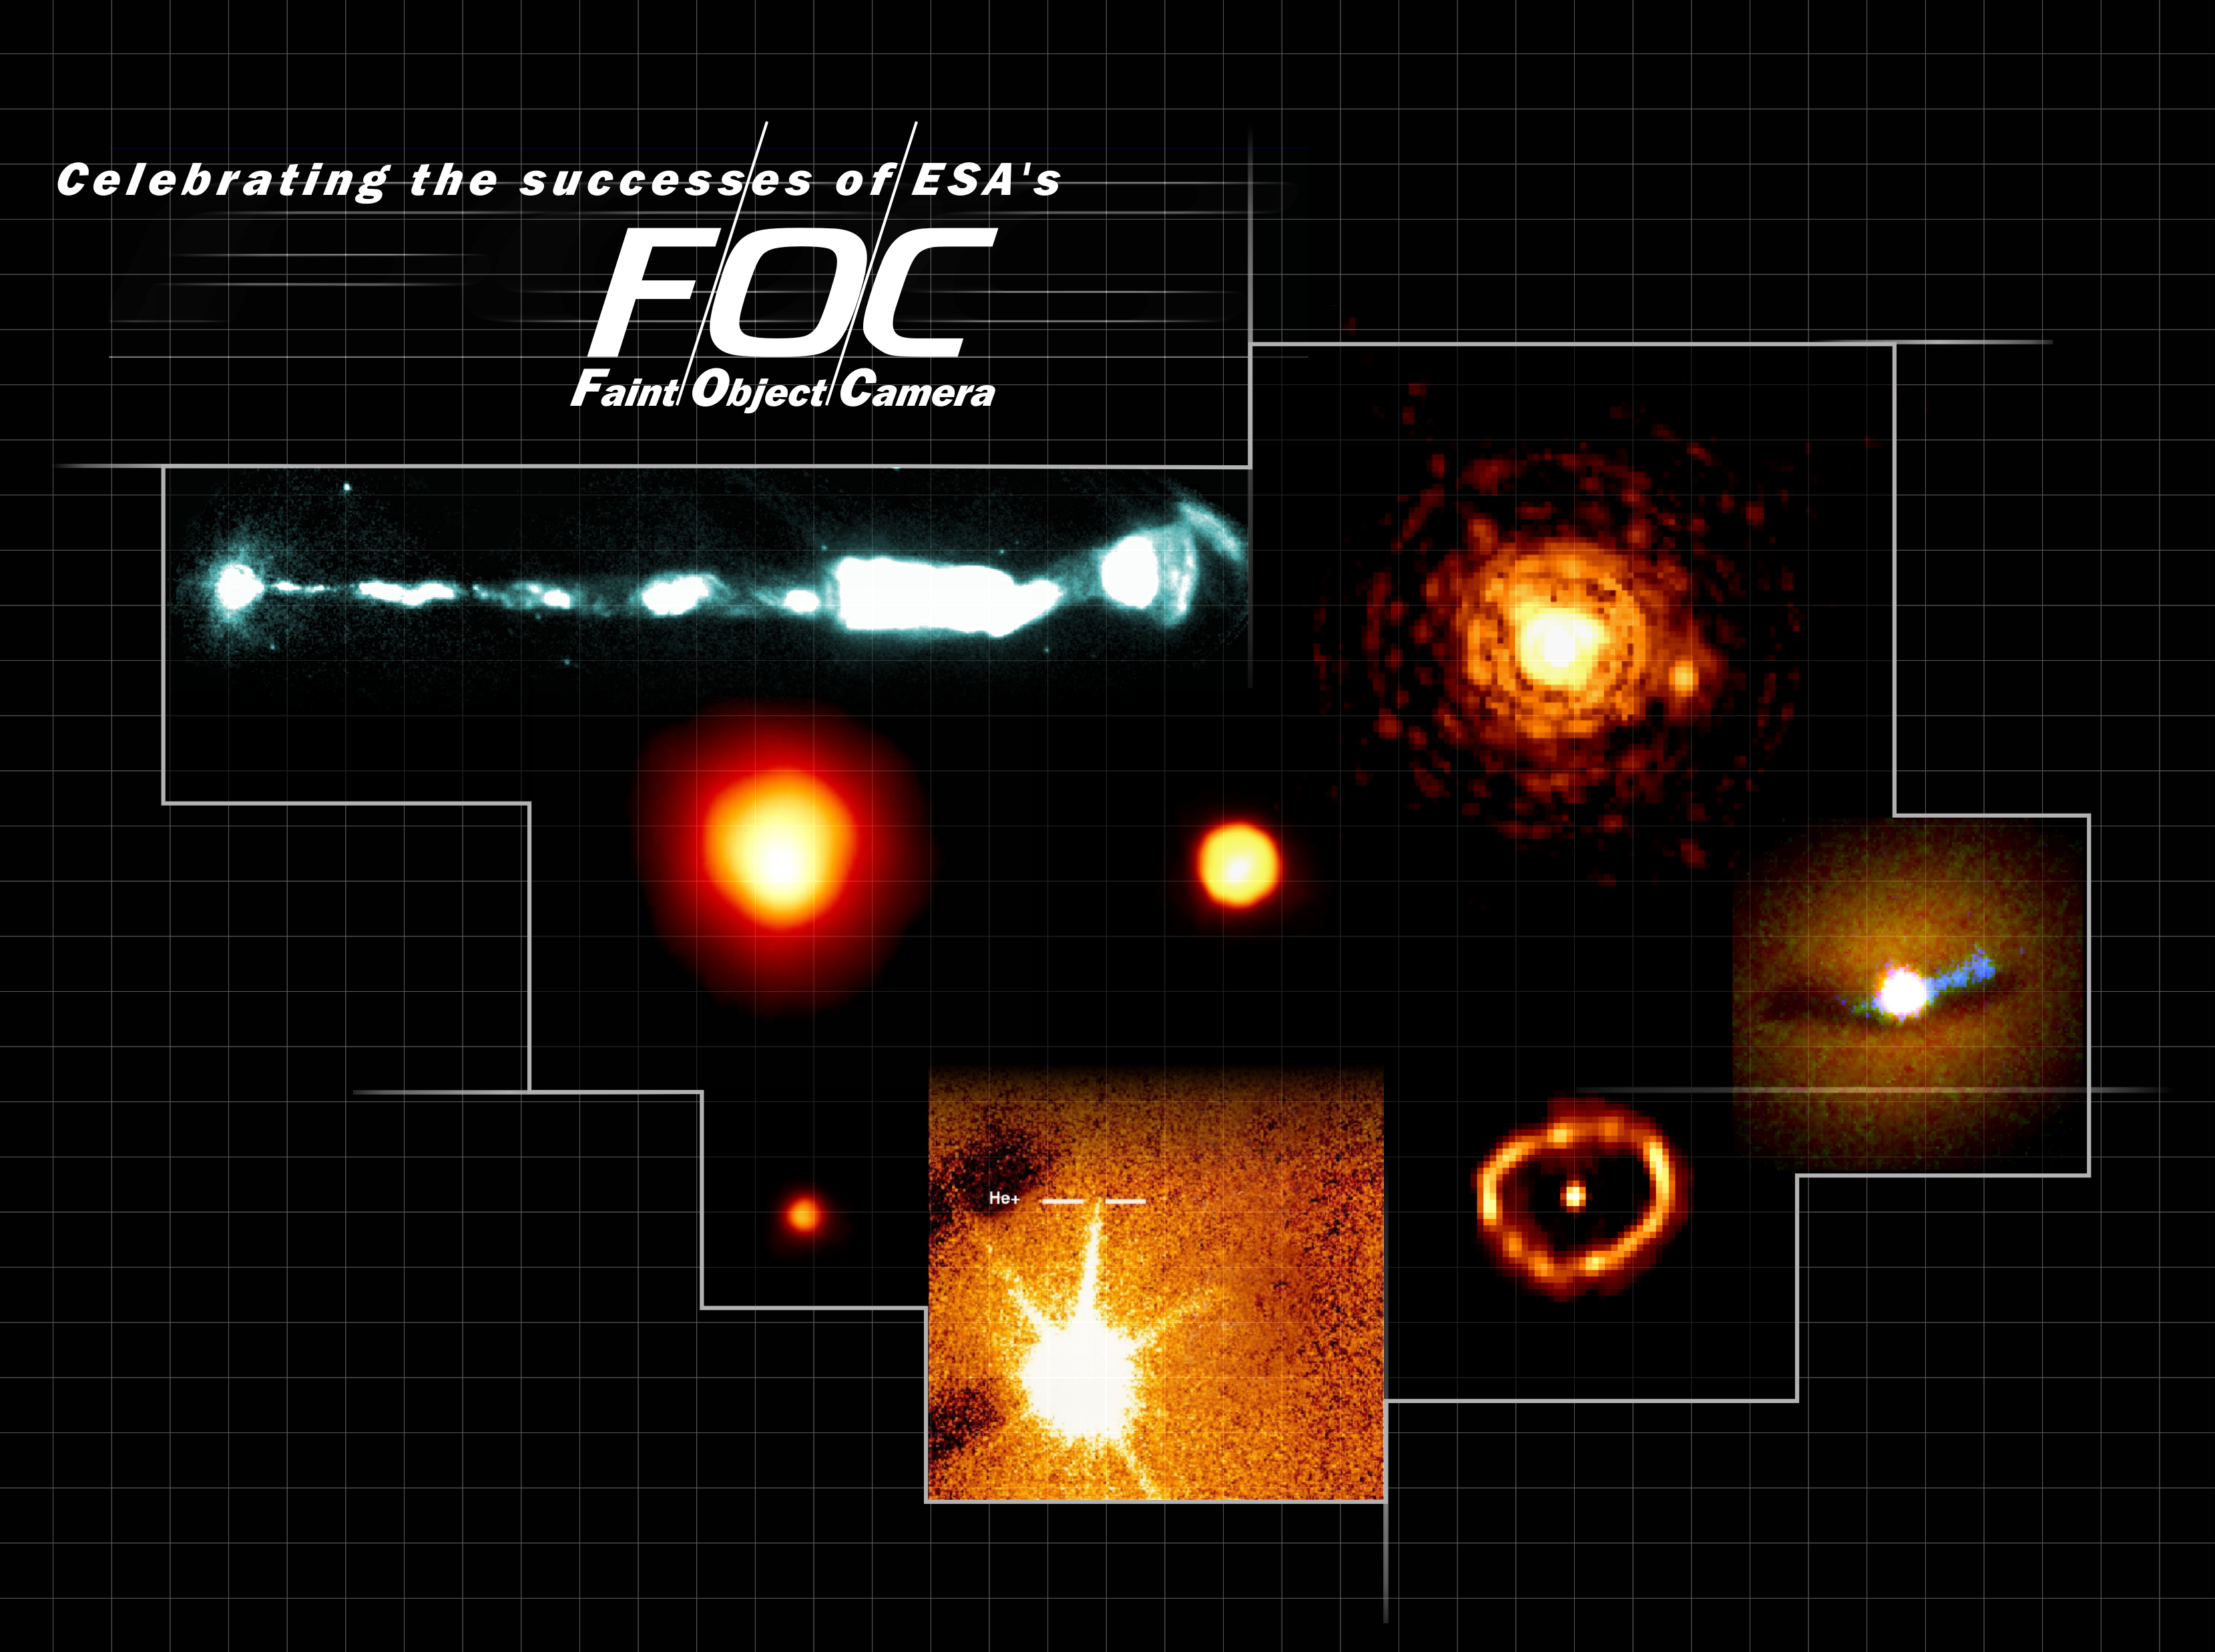

Celebrating the successes of ESA's sharp-sighted camera, the Faint Object Camera

This collage shows some of the scientific successes of ESA’s Faint Object Camera. The foremost scientific capability of the FOC was its ultra-sharp images. The superb FOC image quality was put to use in providing unique close-up views of nearly every class of astronomical object, some of which are seen here. In order from top and clockwise:

M87’s Jet (11 o'clock)

With FOC, astronomers discovered the motion of the jet protruding from the galaxy M87. The galaxy is at a distance of 45 million light years and FOC observations of the jet over a number of years allowed detection and measurement of the motion of knots in the jet. These move at speeds almost equal to the speed of light. The FOC measurements have been a key element in the development of physical models for this impressive phenomenon.

Gliese 623b (2 o'clock)

The small star Gliese 623b, seen left of the bright star in the centre, is one of the smallest stars in the Milky Way. This FOC image was the first image that separated the faint star from its bright companion. Gliese 623b is one of the smallest stars ever photographed.

Core of galaxy NGC 6251 (3 o'clock)

This FOC image of the innermost part of the active galaxy NGC 6251 exposed for the first time the environment very close to a black hole. In the image a warped dust ring is seen bathed in blazing ultraviolet light (blue) from the black hole.

Nova Cygni 1992 (5 o'clock)

This FOC picture is a close-up of the nova called Cygni 1992. The star erupted in 1992 and FOC revealed an expanding ring outlining the edge of a bubble of hot gas blasted into space by the nova.

First detection of singly ionised helium (6 o'clock)

FOC's special ability to detect the very faintest ultraviolet light was extensively used to make spectra of very distant quasars. An effort that ultimately resulted in the first detection of singly ionised helium in the medium between the galaxies. This was characterized by scientists as a breakthrough in cosmology.

Pluto and its moon Charon (7 o'clock)

This FOC image taken in 1994 gave at the time the clearest view of our Solar System's most distant planet Pluto (large orange disk) and its moon Charon (small orange disk). The image also revealed surface details on Pluto for the first time.

The first image of the atmosphere of a star (9 o'clock)

The star Betelgeuze is seen here in a very high magnification view made possible by ESA's FOC. For the first time it was possible to see details in the atmosphere in a star outside our Solar System.

Credit: European Space Agency & NASA